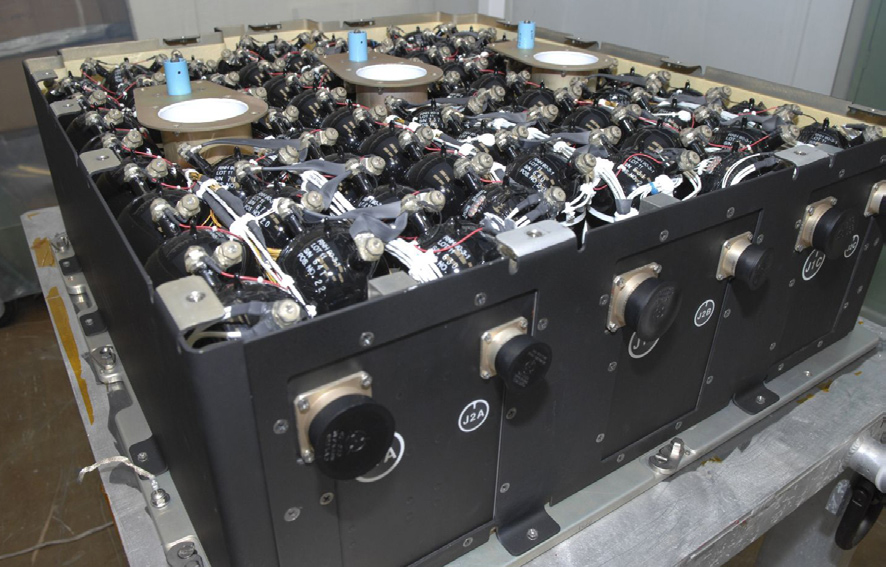

Hubble's Battery Module Assembly with lid removed

Battery Module Assembly with lid removed, showing the cells and power isolation switches

Credit: NASA